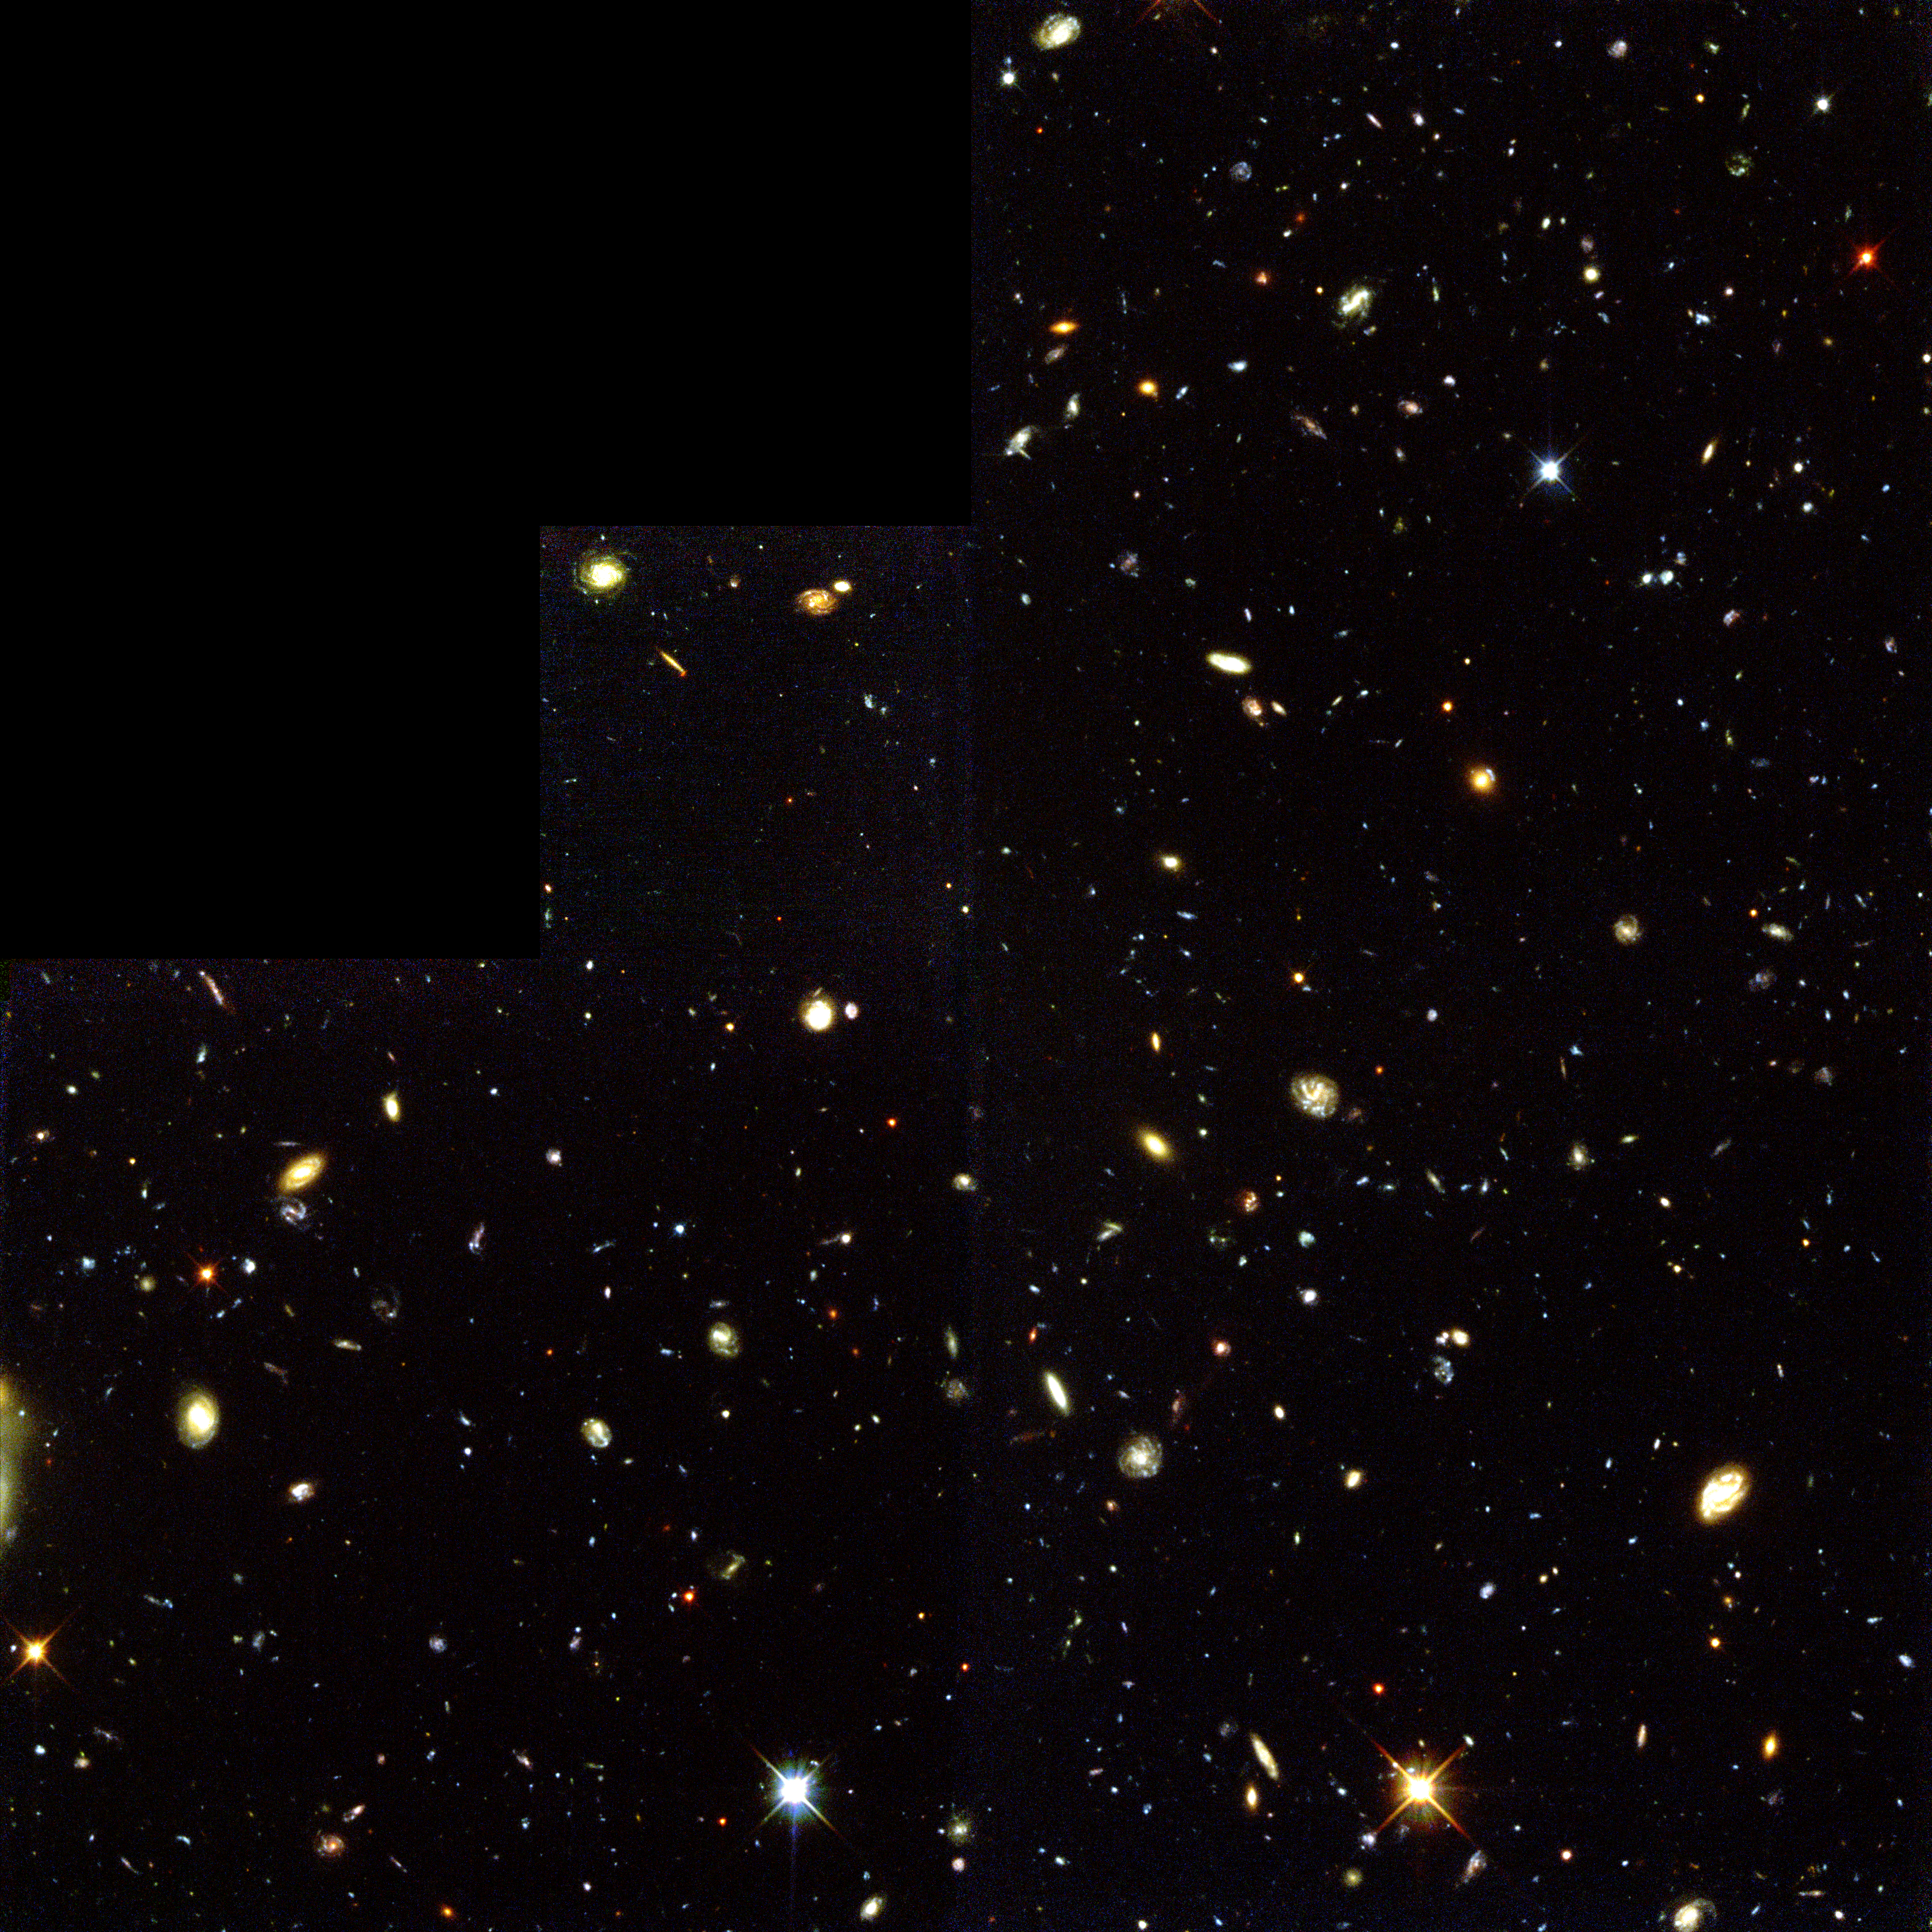

Hubble Deep Field South--Multiple windows on the Universe

The deepest visible/ultraviolet light image of the universe ever taken, revealing galaxies down to 30th magnitude. Glaring fiercely across 12 billion light-years of space is the brilliant beacon of a distant quasar (z=2.2). Most of the galaxies in this view lie between us and the quasar. The image was taken with the Wide Field Planetary Camera 2. Light from the galaxies was also analysed with the Space Telescope Imaging Spectrograph (STIS

Credit: R. Williams (STScI), the HDF-S Team, and NASA/ESA